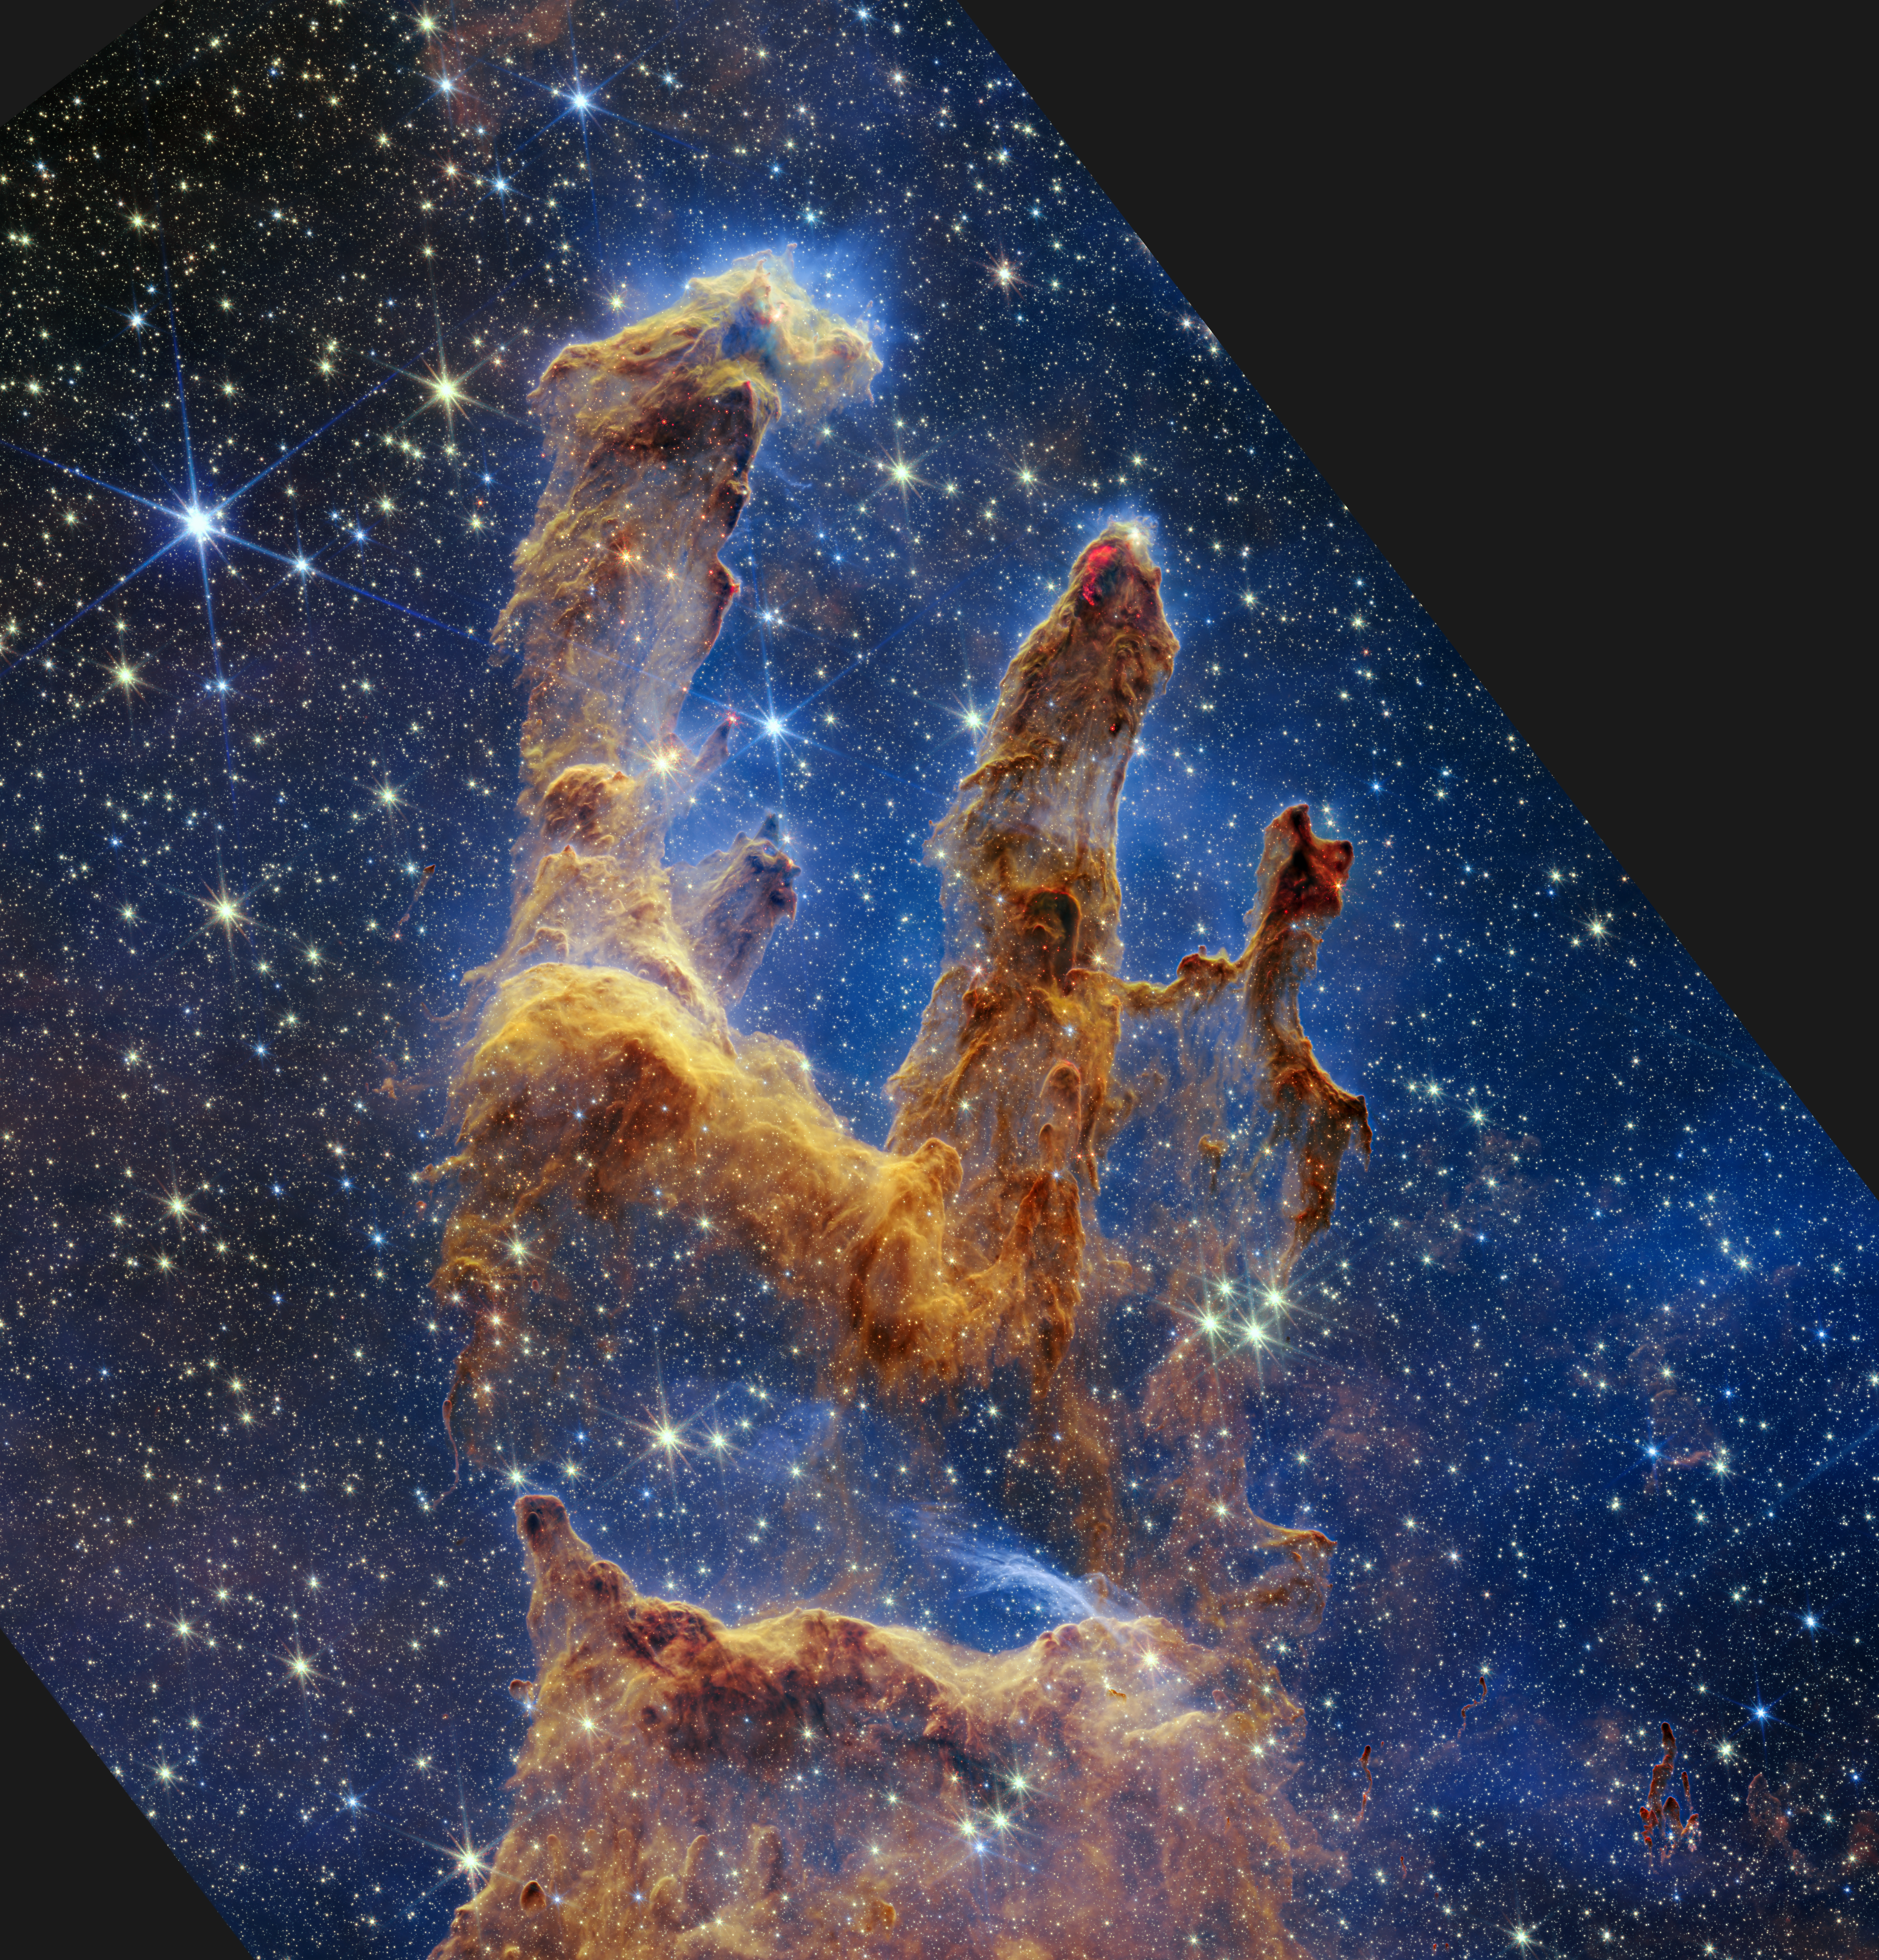

Webb's New View of the Pillars of Creation (2022)

The Pillars of Creation are set off in a kaleidoscope of colour in the NASA/ESA/CSA James Webb Space Telescope’s near-infrared-light view. The pillars look like arches and spires rising out of a desert landscape, but are filled with semi-transparent gas and dust, and ever changing. This is a region where young stars are forming – or have barely burst from their dusty cocoons as they continue to form.

Protostars are the scene-stealers in this Near-Infrared Camera (NIRCam) image. These are the bright red orbs that sometimes appear with eight diffraction spikes. When knots with sufficient mass form within the pillars, they begin to collapse under their own gravity, slowly heat up, and eventually begin shining brightly.

Along the edges of the pillars are wavy lines that look like lava. These are ejections from stars that are still forming. Young stars periodically shoot out jets that can interact within clouds of material, like these thick pillars of gas and dust. This sometimes also results in bow shocks, which can form wavy patterns like a boat does as it moves through water. These young stars are estimated to be only a few hundred thousand years old, and will continue to form for millions of years.

Although it may appear that near-infrared light has allowed Webb to “pierce through” the background to reveal great cosmic distances beyond the pillars, the interstellar medium stands in the way, like a drawn curtain.

This is also the reason why there are no distant galaxies in this view. This translucent layer of gas blocks our view of the deeper universe. Plus, dust is lit up by the collective light from the packed “party” of stars that have burst free from the pillars. It’s like standing in a well-lit room looking out a window – the interior light reflects on the pane, obscuring the scene outside and, in turn, illuminating the activity at the party inside.

Webb’s new view of the Pillars of Creation will help researchers revamp models of star formation. By identifying far more precise star populations, along with the quantities of gas and dust in the region, they will begin to build a clearer understanding of how stars form and burst out of these clouds over millions of years.

The Pillars of Creation is a small region within the vast Eagle Nebula, which lies 6,500 light-years away.

Webb’s NIRCam was built by a team at the University of Arizona and Lockheed Martin’s Advanced Technology Center.

Credit: NASA, ESA, CSA, STScI; J. DePasquale, A. Koekemoer, A. Pagan (STScI).